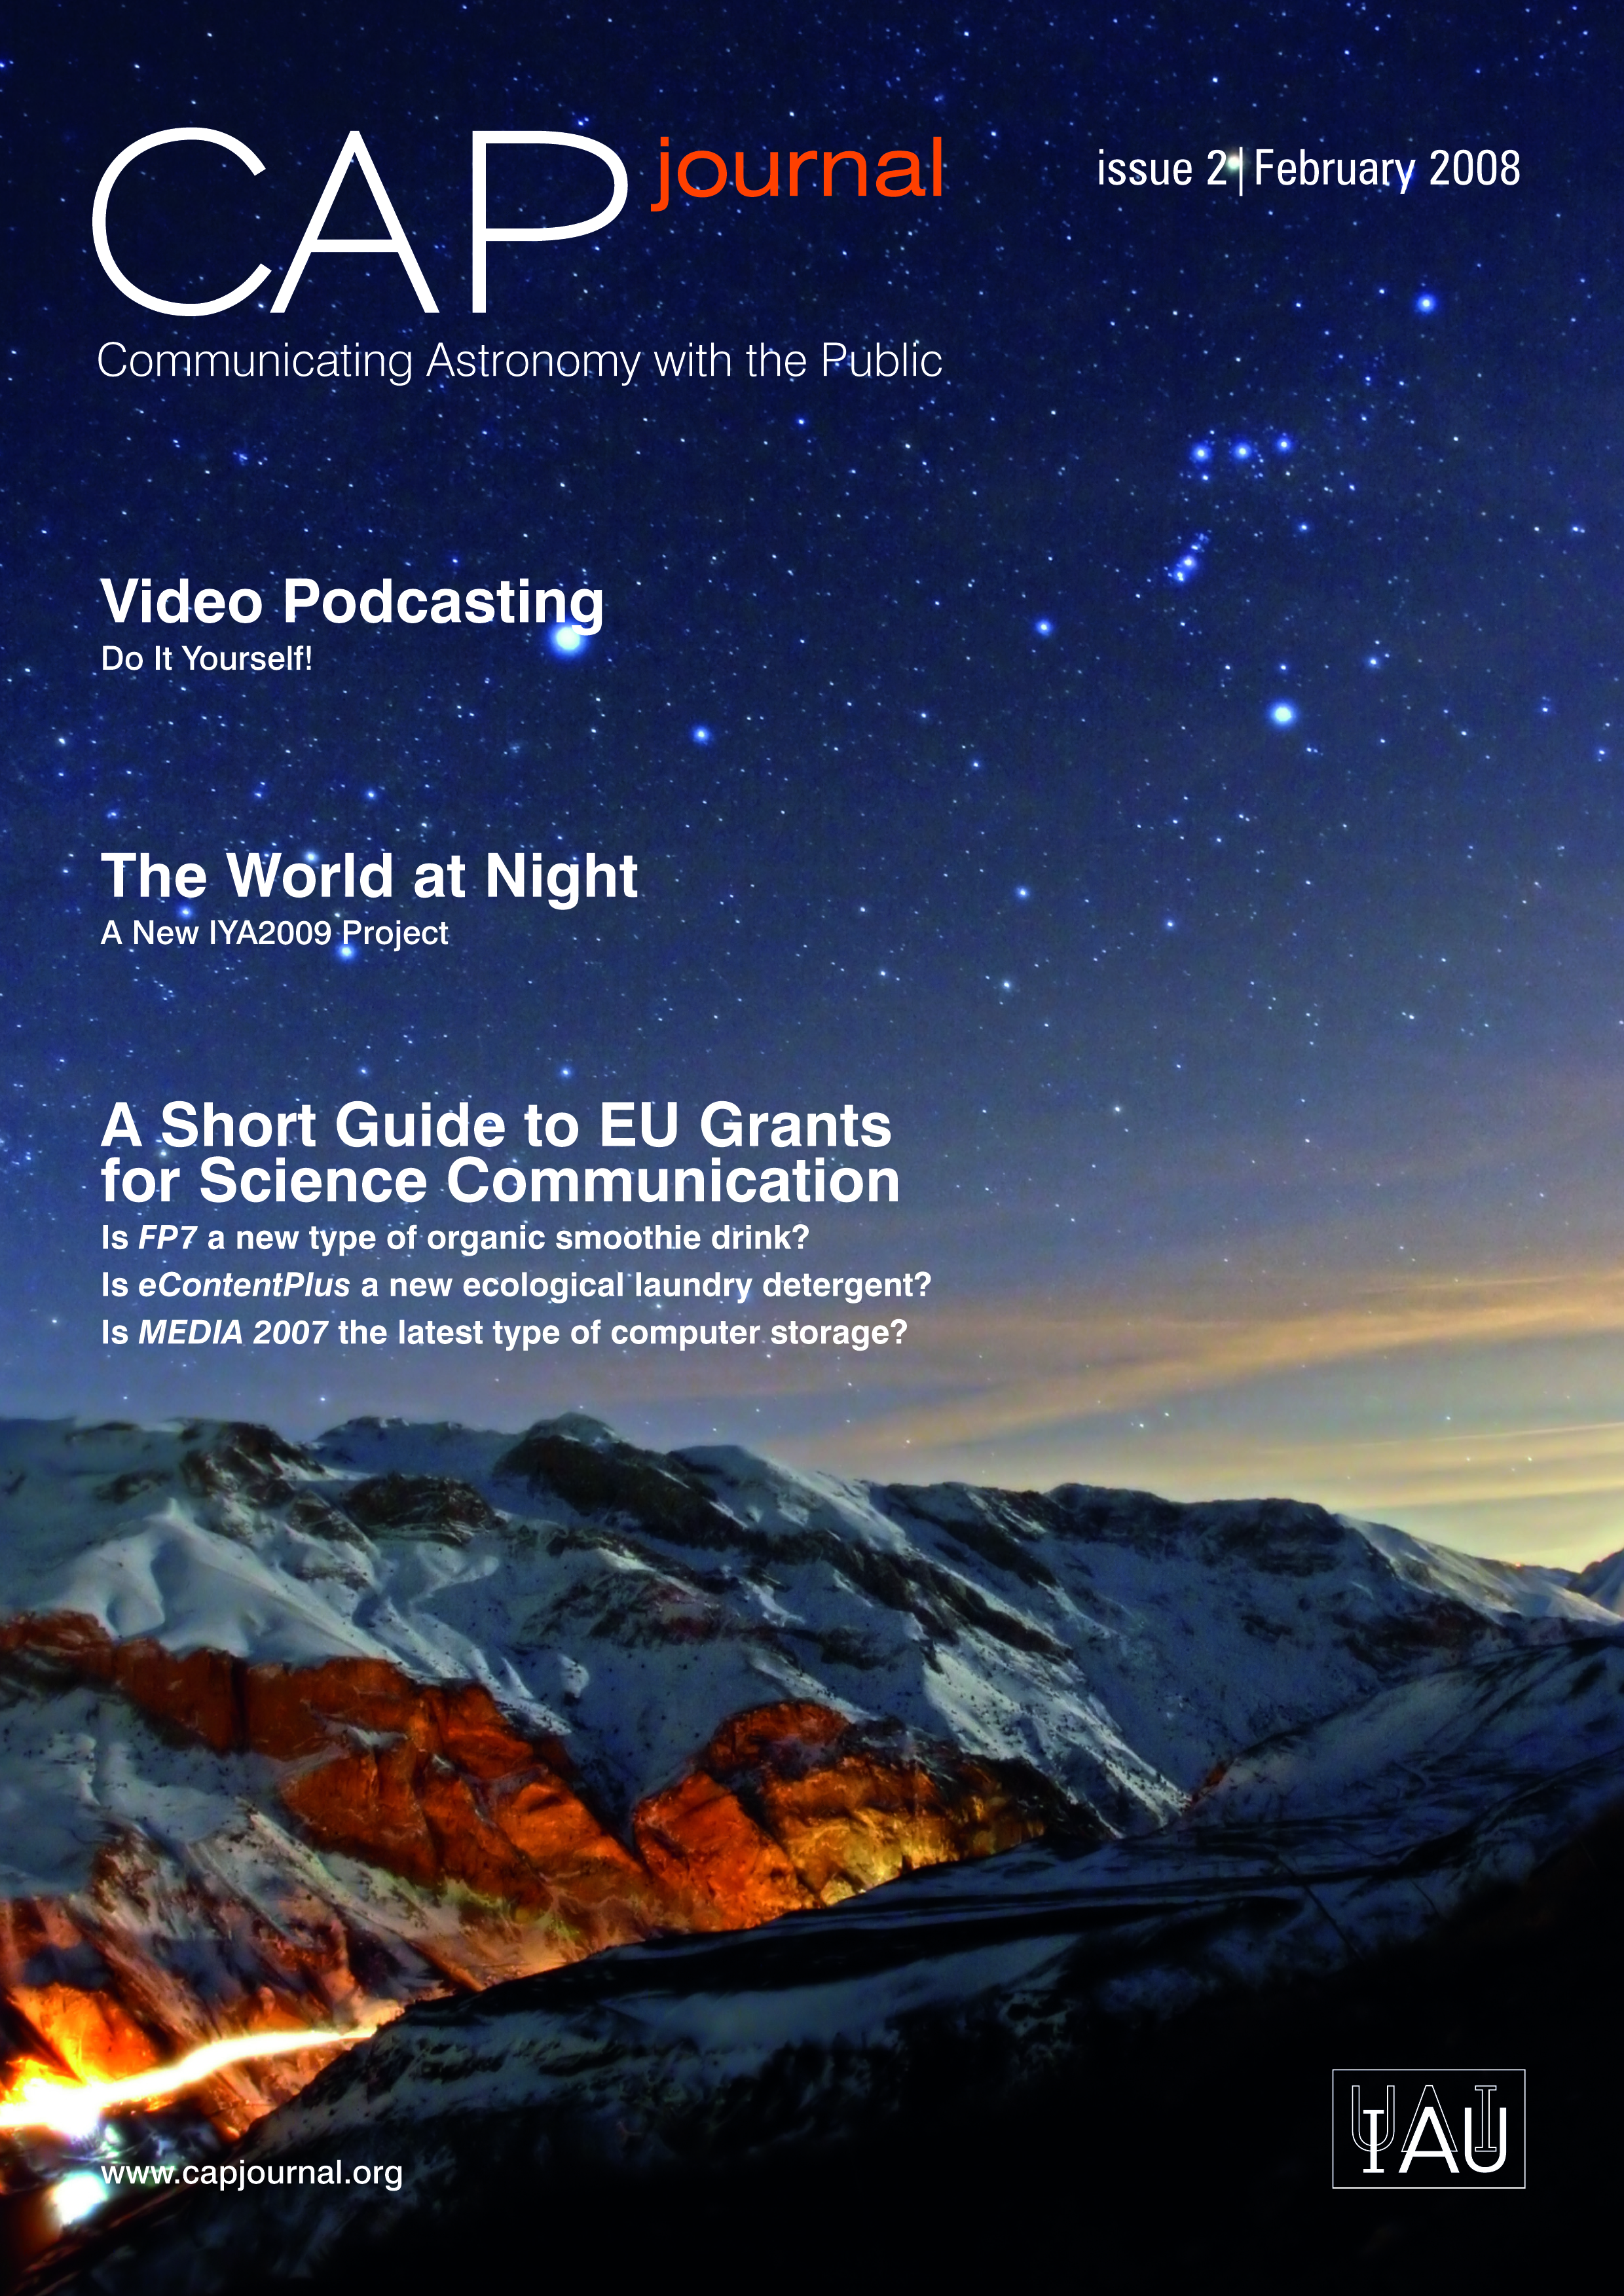

The Communicating Astronomy with the Public journal #2 is out!

In this issue we marvel at the breathtaking images taken by astrophotographers from The "World at Night project", get insider tips from authors of two popular astronomy vodcasts, learn how to navigate the labyrinth of European Commission grants for education/outreach and much more.

CAPjournal is a newcomer to the field, but we are very happy with the community feedback, which gives us an added incentive to continue. Between editions you can stay in touch through our website, www.capjournal.org, discussions on the papers, a job bank, back issues and the current issue of CAPjournal.

Check out the full articles on: http://www.capjournal.org/issues/02/index.php

Credit: NASA & ESA